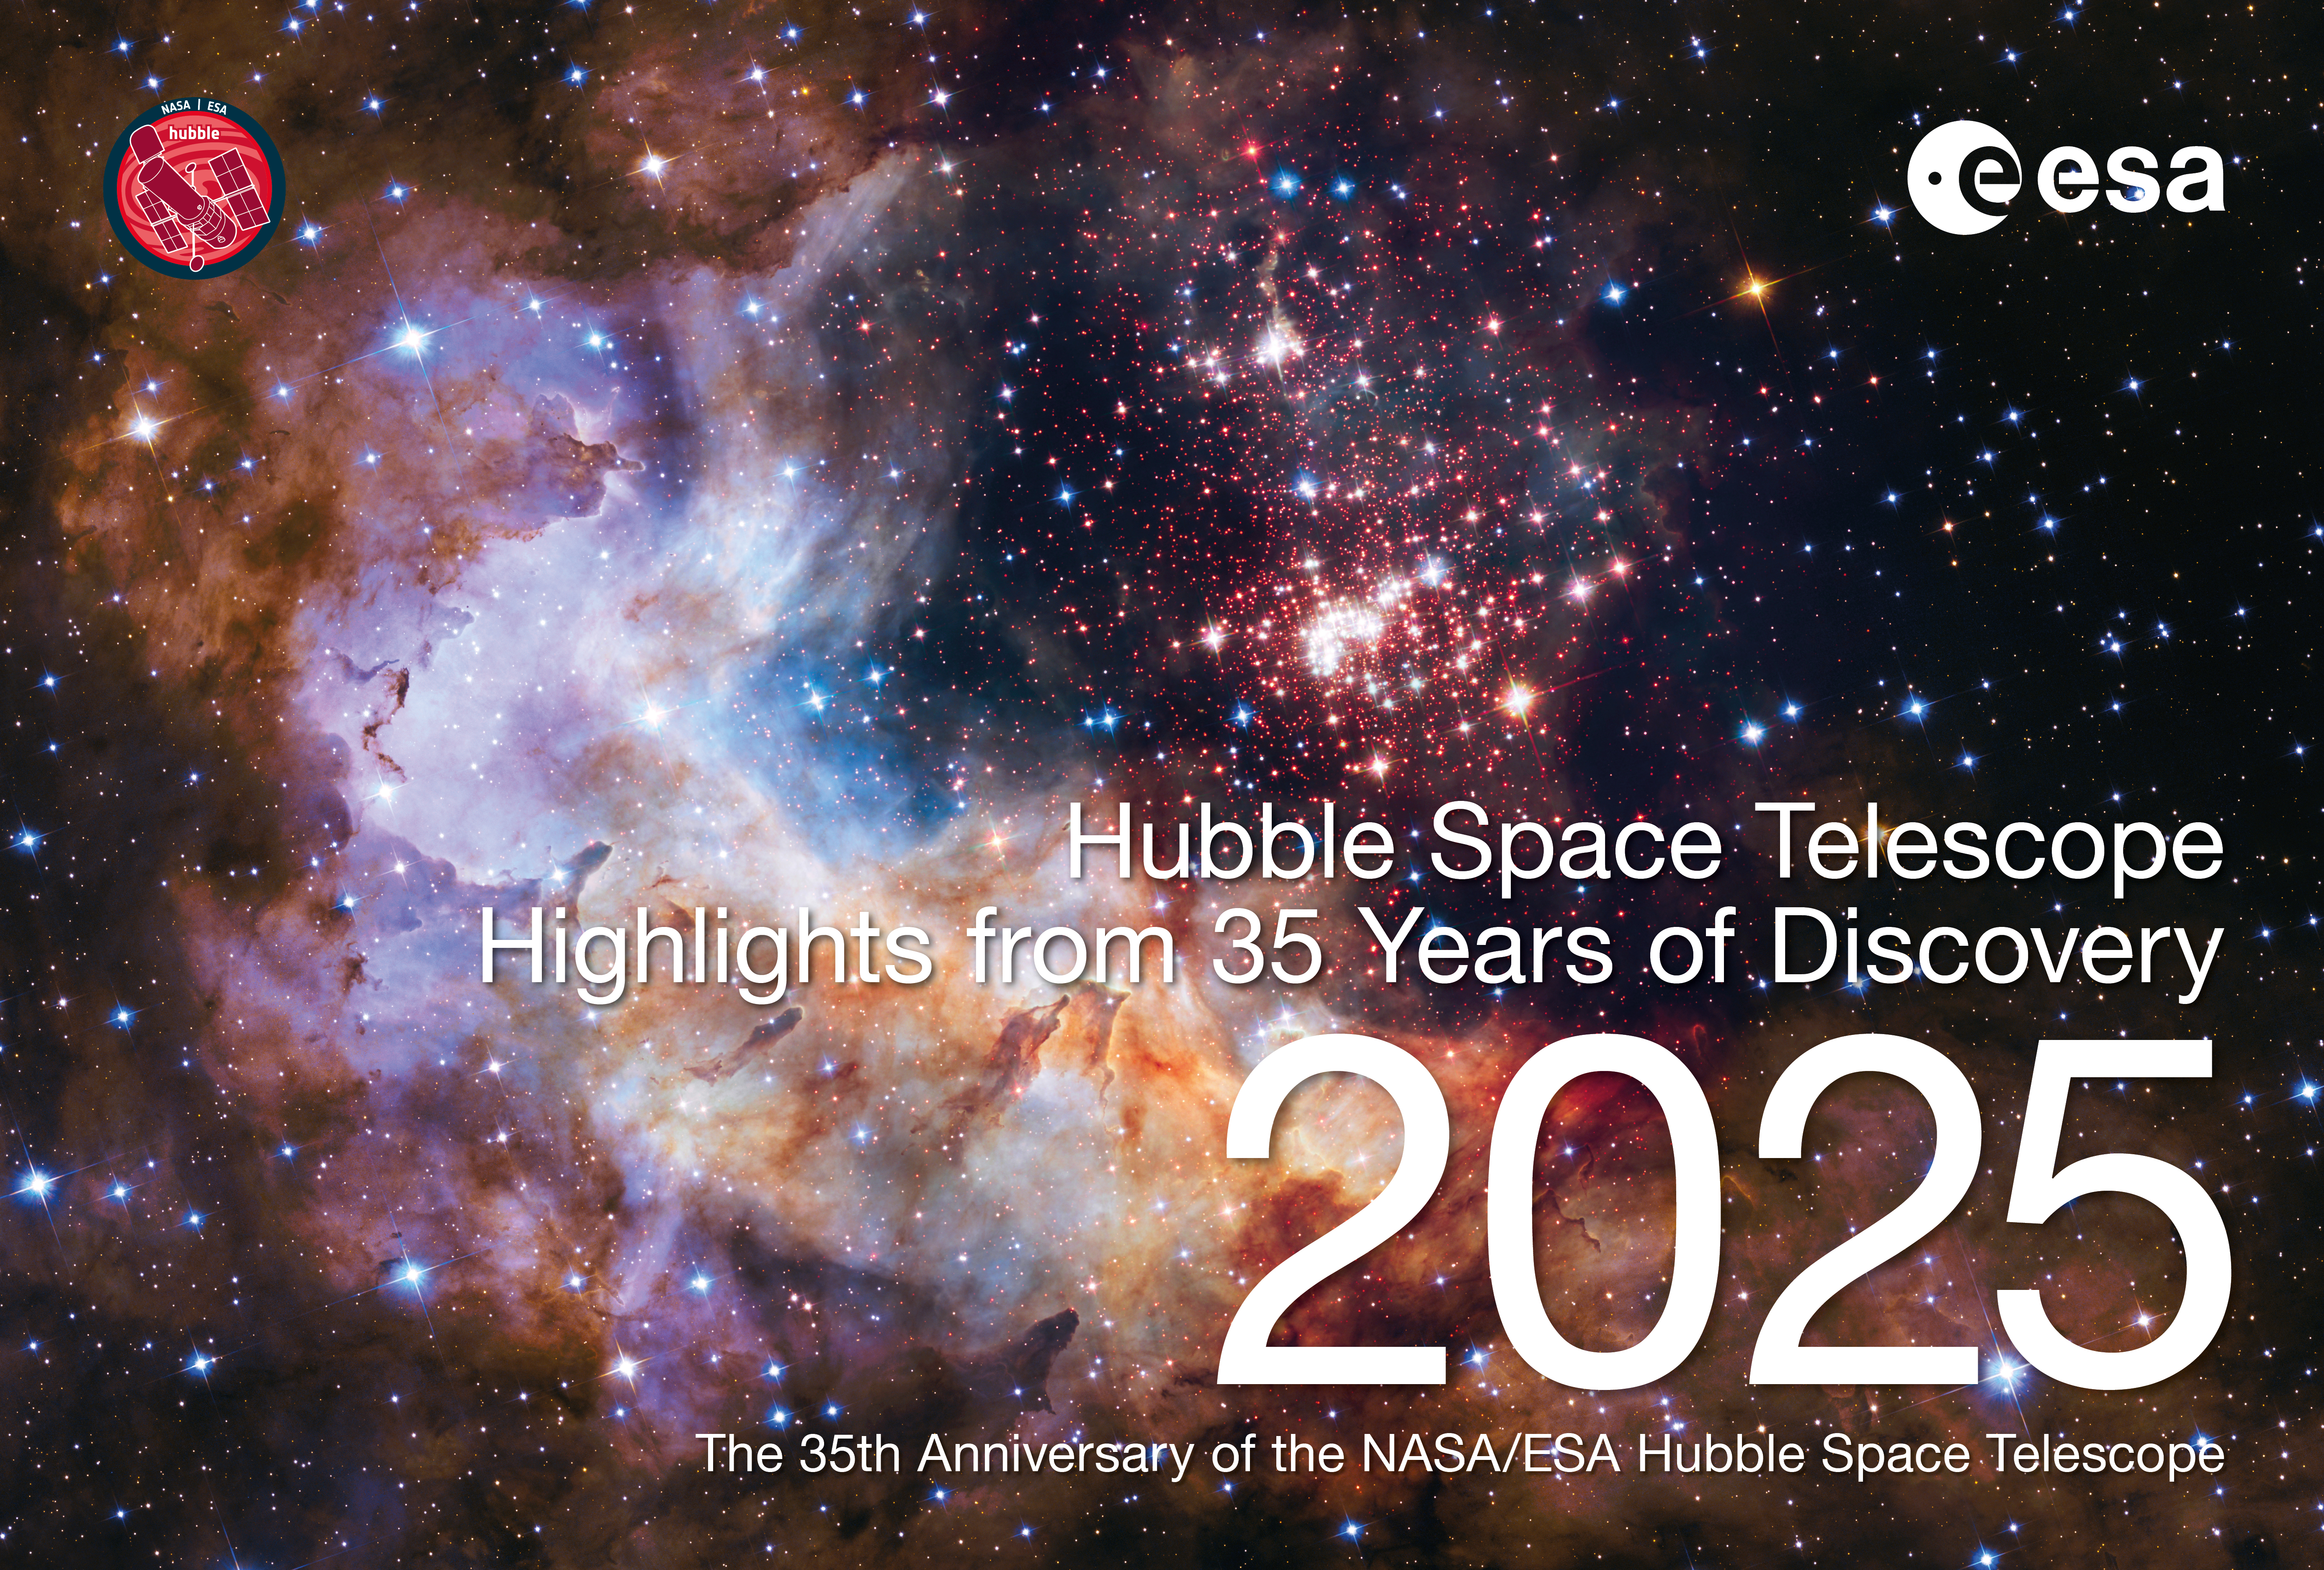

Cover page of the ESA/Hubble 35th anniversary calendar

This is the cover page for the ESA/Hubble 35th anniversary calendar “Highlights from 35 Years of Discovery”, a 2025 calendar featuring images released on past anniversaries between 1998 and 2024. The electronic version of the calendar is available in digital (low and high resolution) and print-ready versions for everyone to share and enjoy.

Credit: ESA/Hubble